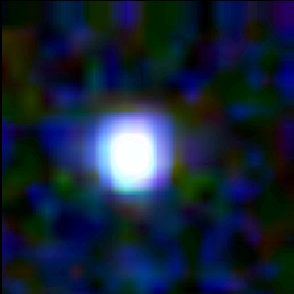

Galaxy building blocks

This is one Proto Galaxy out of a series of 18, taken by the Wide Field Planetary Camera 2.

Credit: Rogier Windhorst and Sam Pascarelle (Arizona State University) and NASA/ESA